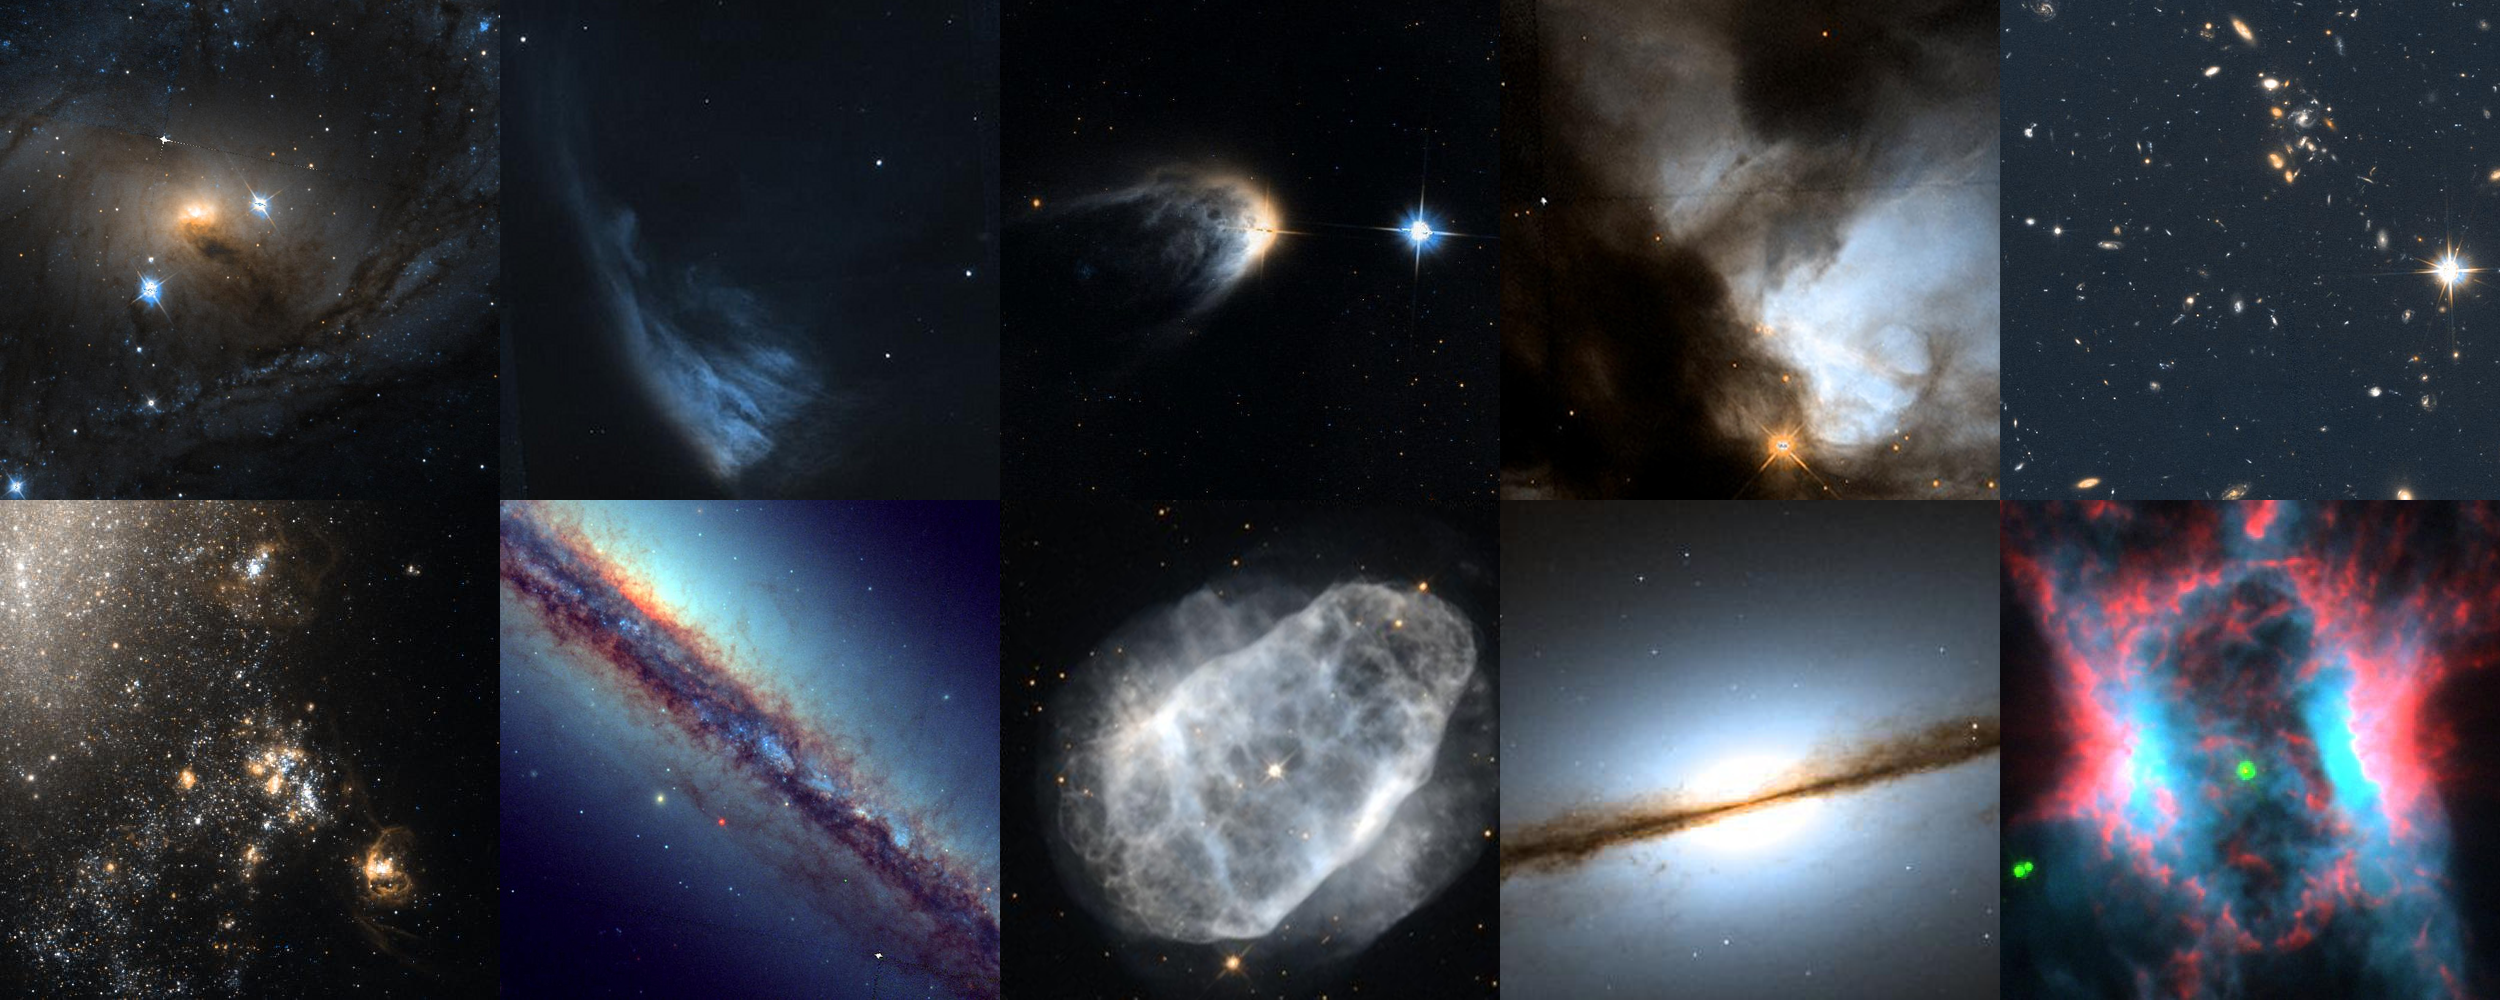

Collage of top images in the Hidden Treasures basic imaging competition

This image shows the top ten images entered into the Hubble's Hidden Treasures basic competition:

Top row: NGC 6300 by Brian Campbell, V* PV Cephei by Alexey Romashin, IRAS 14568-6304 by Luca Limatola, NGC 1579 by Kathlyn Smith, B 1608+656 by Adam Kill

Bottom row: NGC 4490 by Kathy van Pelt, NGC 6153 by Ralf Schoofs, NGC 6153 by Matej Novak, NGC 7814 by Gavrila Alexandru, NGC 7026 by Linda Morgan-O’Connor

Credit: NASA & ESA